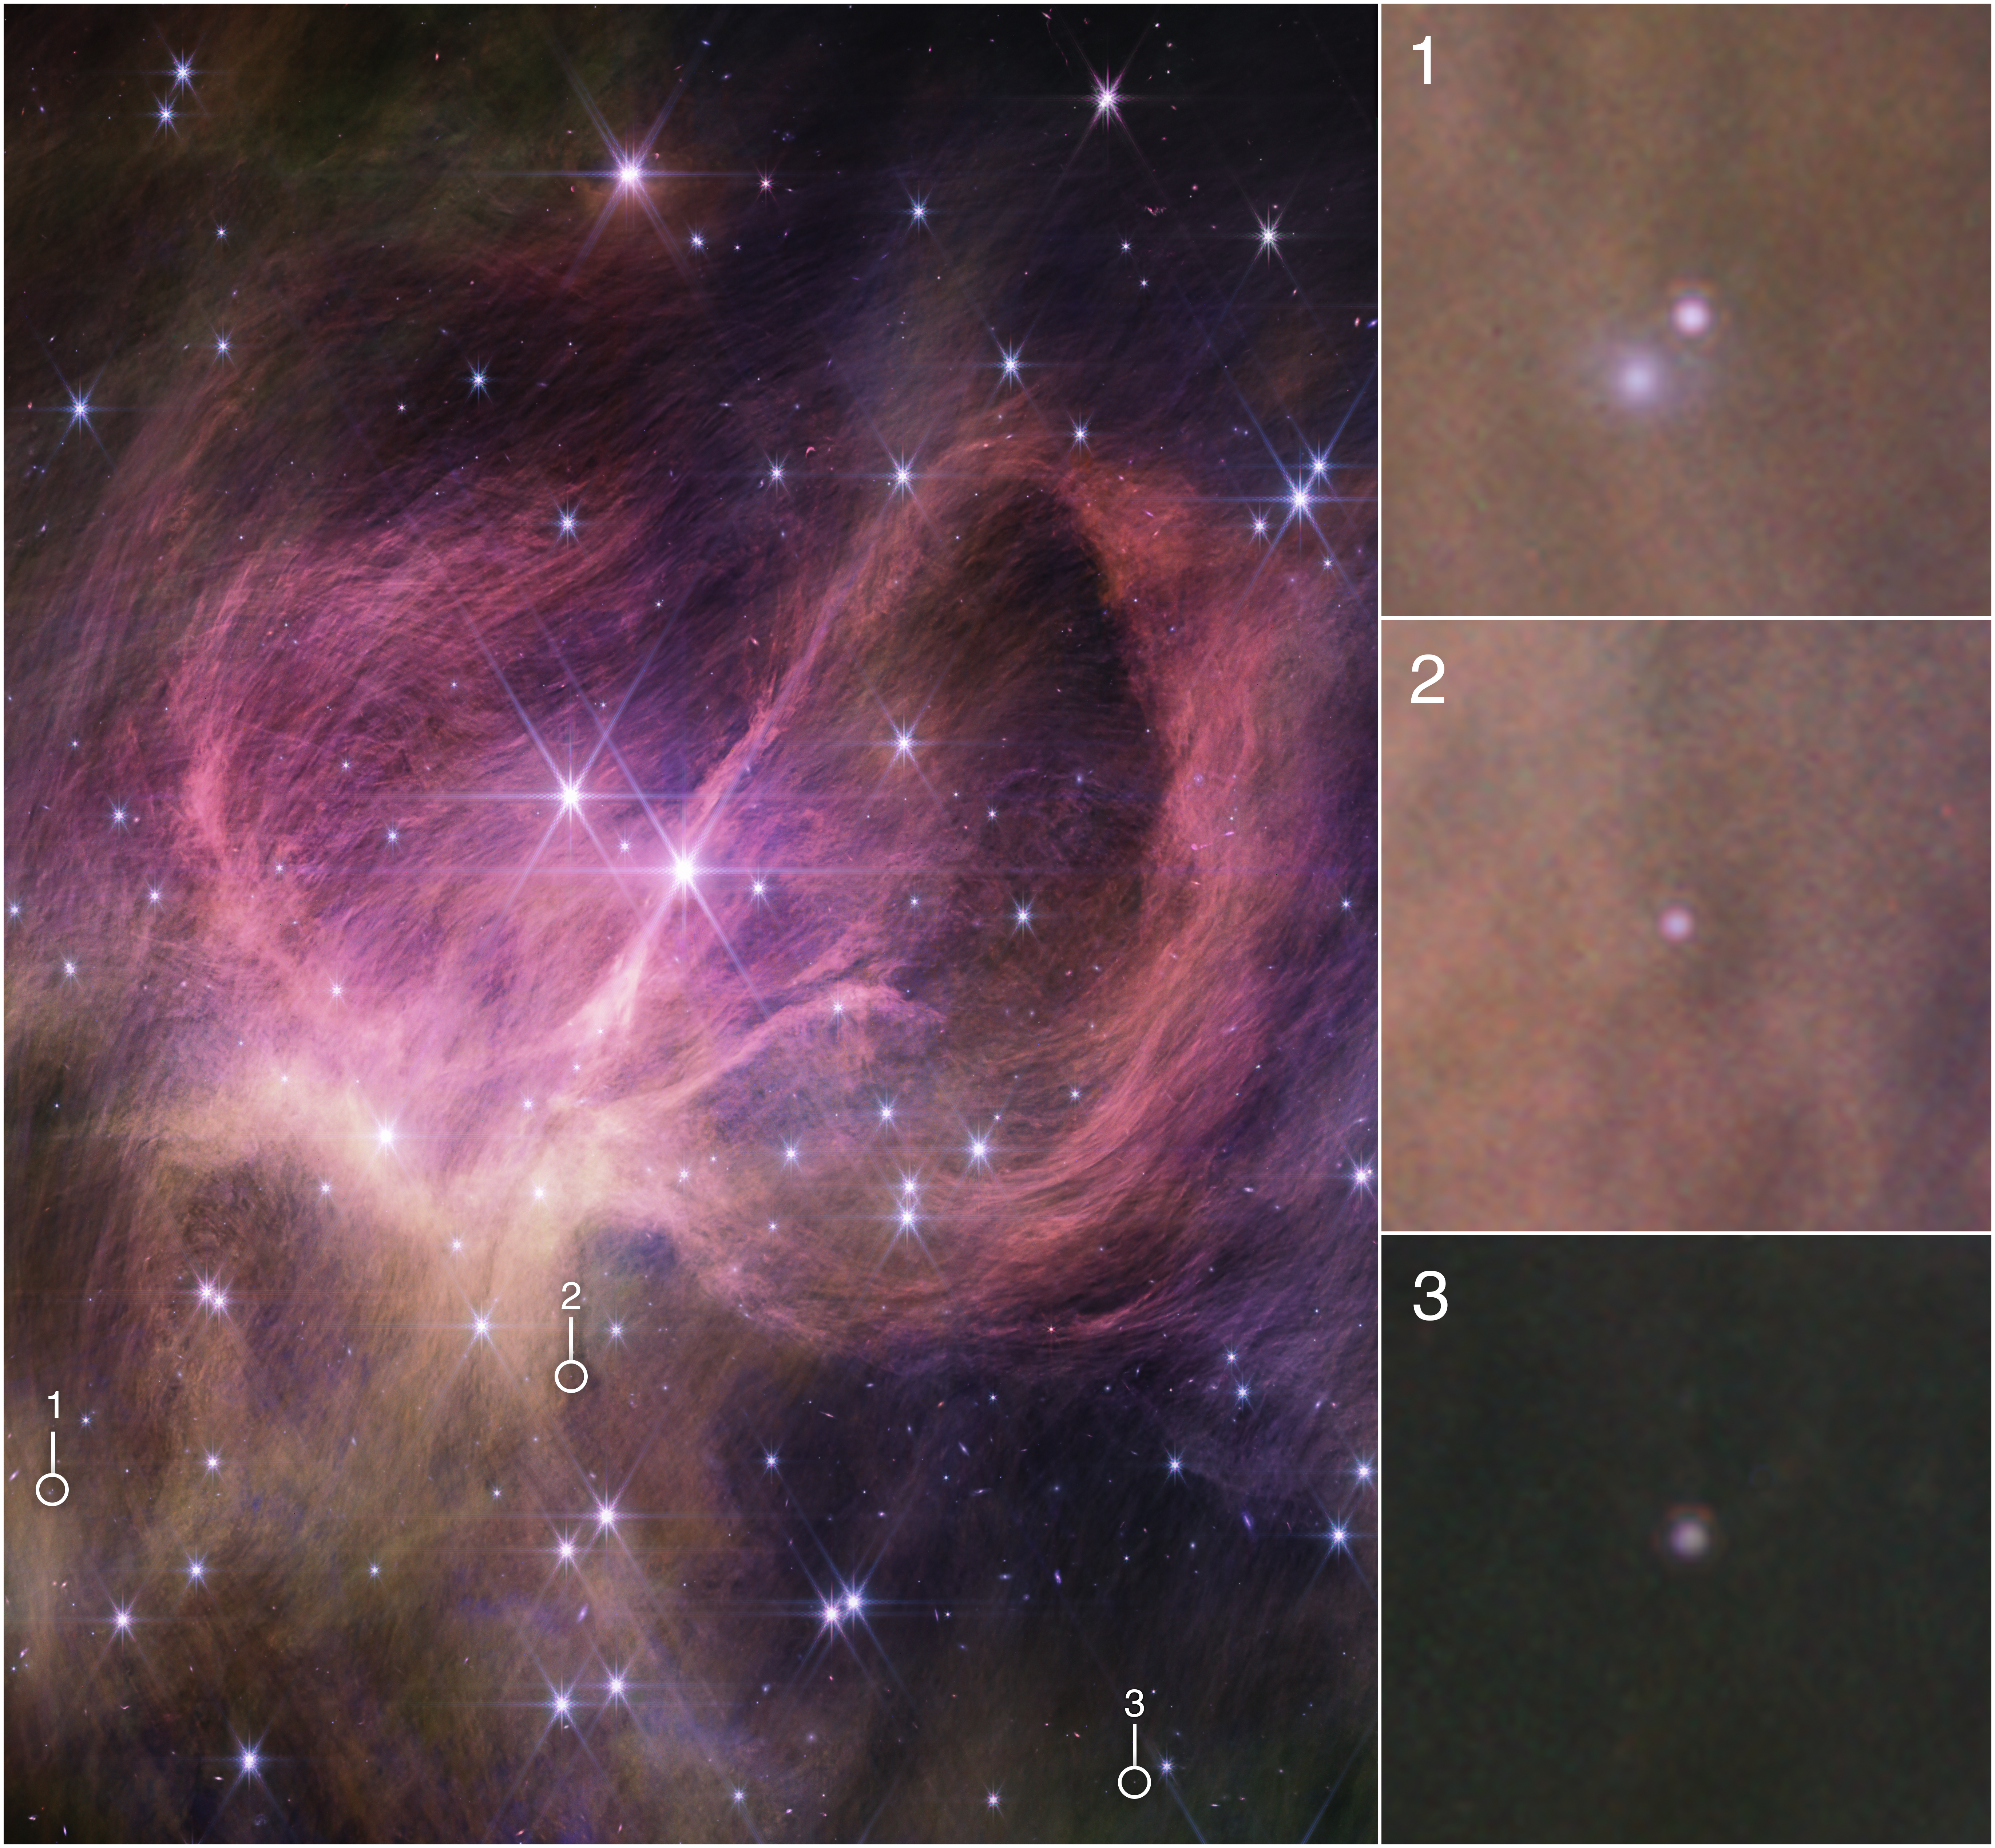

Star Cluster IC 348 (NIRCam image annotated)

This image from the NIRCam (Near-Infrared Camera) instrument on NASA’s James Webb Space Telescope shows the central portion of the star cluster IC 348. Astronomers combed the cluster in search of tiny, free-floating brown dwarfs: objects too small to be stars but larger than most planets. They found three brown dwarfs that are less than eight times the mass of Jupiter, which are circled in the main image and shown in the detailed pullouts at right. The smallest weighs just three to four times as much as Jupiter, challenging theories for star formation.

The wispy curtains filling the image are interstellar material reflecting the light from the cluster’s stars — what is known as a reflection nebula. The material also includes carbon-containing molecules known as polycyclic aromatic hydrocarbons, or PAHs. The bright star closest to the centre of the frame is actually a pair of type B stars in a binary system, the most massive stars in the cluster. Winds from these stars may help sculpt the large loop seen on the right side of the field of view.

Credit: NASA, ESA, CSA, STScI, and K. Luhman (Penn State University) and C. Alves de Oliveira (European Space Agency)